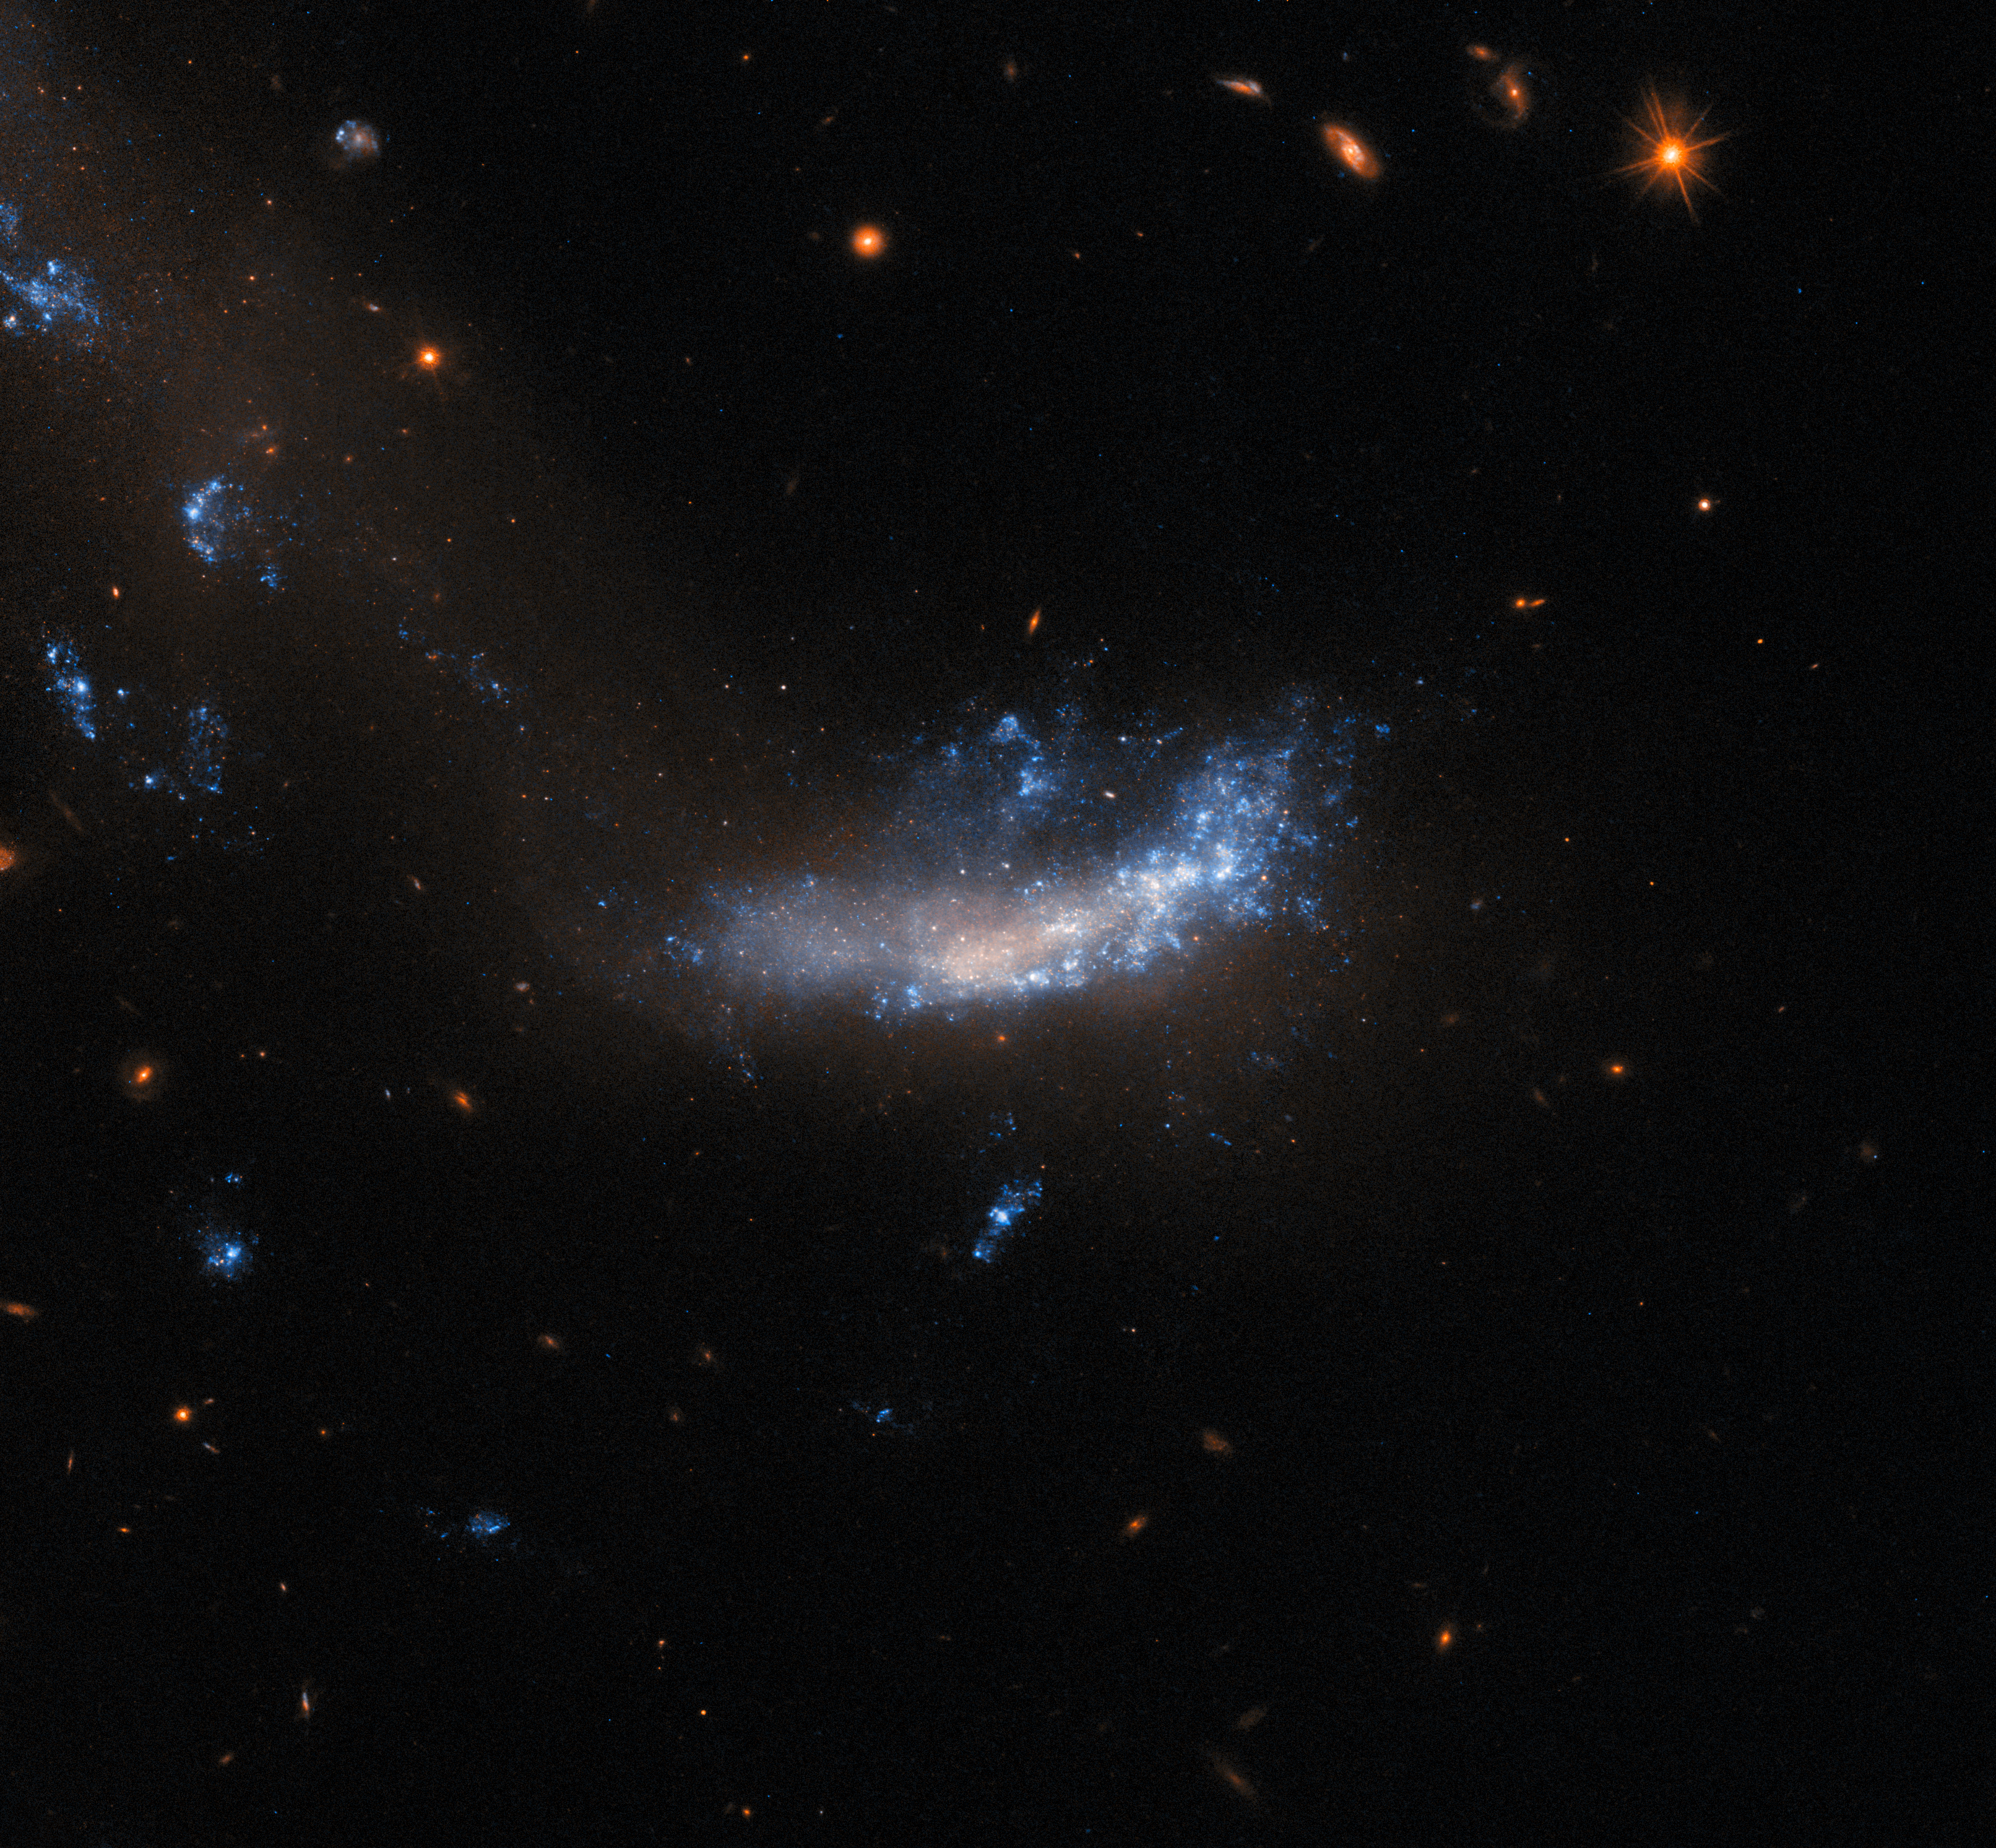

Gone but not forgotten

This image features a relatively small galaxy known as UGC 5189A, which is located about 150 million light-years away in the constellation Leo. This galaxy was observed by Hubble to study a supernova explosion in 2010 known as SN 2010jl. This particular supernova was notable for having been an exceptionally luminous supernova event. In fact, over a period of three years, SN 2010jl released at least 2.5 billion times more visible energy alone than our Sun emitted over the same timeframe across all wavelengths.

Even after supernovae have faded to non-observable levels, it can still be of interest to study the environments where they occurred. This can provide astronomers with valuable information: supernovae can take place for a variety of reasons, and understanding the environments in which they took place can help improve our understanding of the conditions necessary for them to be triggered. Furthermore, follow-up studies after supernovae can improve our understanding of the immediate aftermath of such events, from their potent effects on the gas and dust around them, to the stellar remnants they leave behind.

To this end, UGC 5189A has been observed many times by Hubble since 2010. This image is from data collected in three of the latest Hubble studies of UGC 5189A, which also examined several other relatively nearby galaxies that recently hosted supernovae — ‘relatively nearby’, in this context, meaning roughly 100 million light years away.

Credit: ESA/Hubble & NASA, A. Filippenko